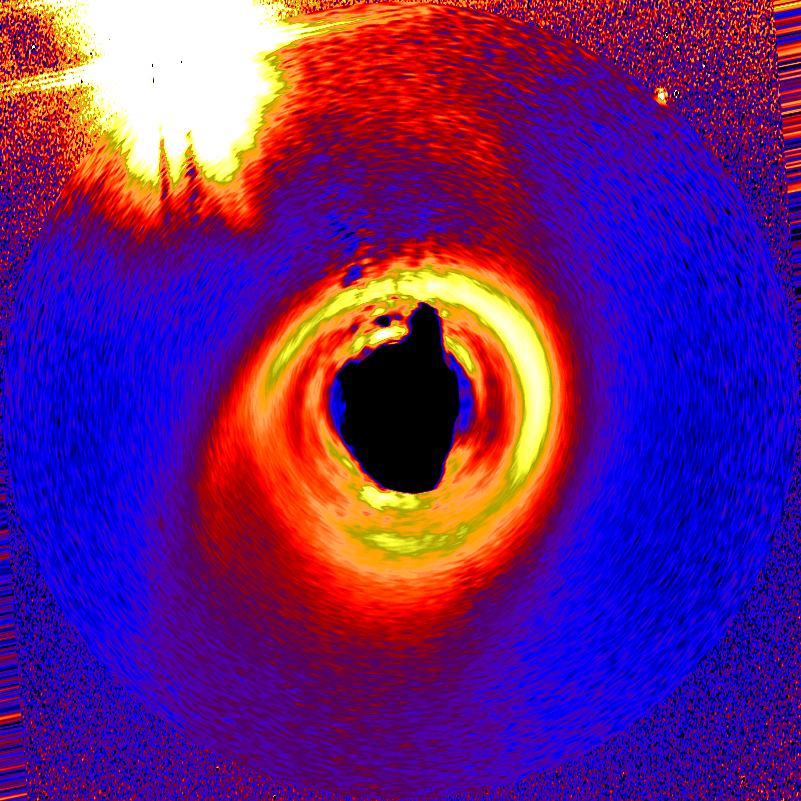

HD141569 Circumstellar Disk

NASA Hubble Space Telescope's new Advanced Camera for Surveys (ACS) has given astronomers their clearest view yet of the dust disk around a young, 5-million-year-old star. Such disks are expected to be the birthplace of planets. The star, called HD 141569A, lies 320 light-years away in the constellation Libra and appears to be a member of a triple-star system. The image at left shows the star and disk as it appears in space. The system is slightly tilted when viewed from Earth. This photo at portrays the system if astronomers could view it from above.

Credit: NASA, M. Clampin (STScI), H. Ford (JHU), G. Illingworth(UCO/Lick), J. Krist (STScI), D. Ardila (JHU), D. Golimowski (JHU) the ACS Science Team and ESA